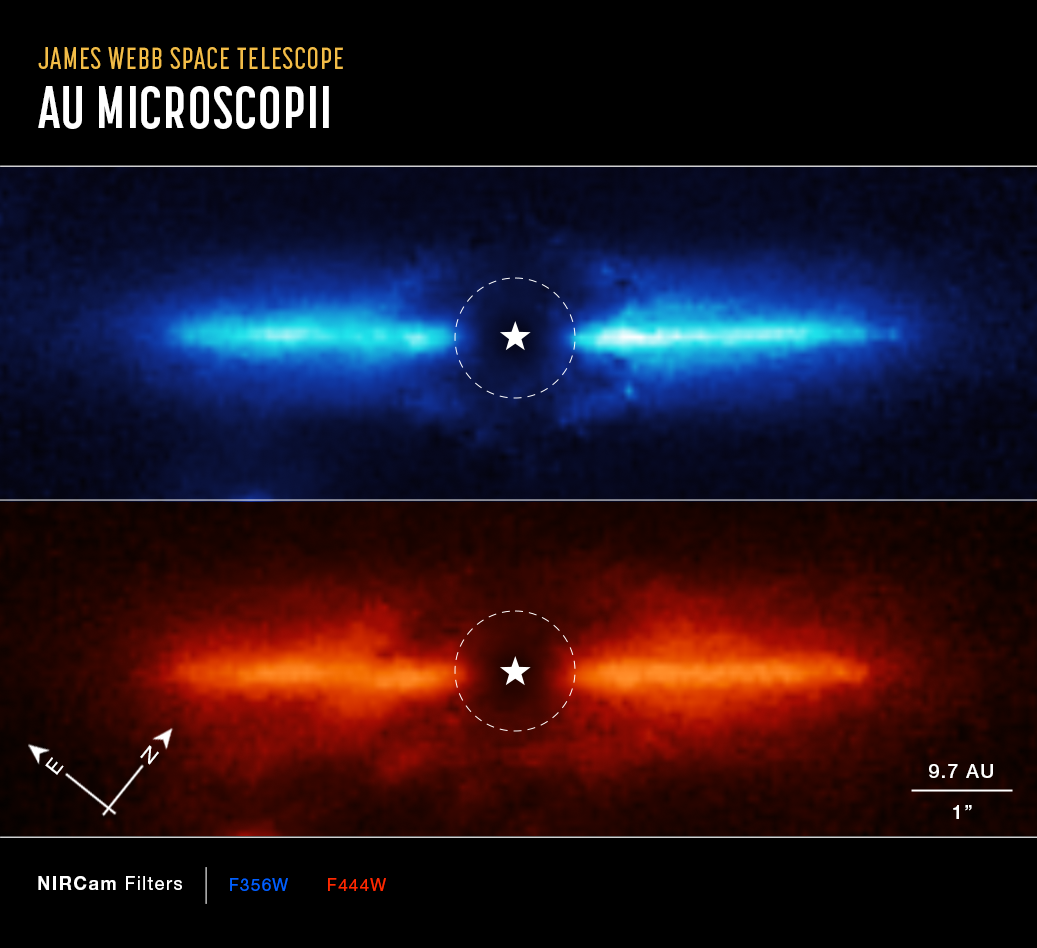

Dusty Debris Disk Around AU Mic (Annotated)

The NASA/ESA/CSA James Webb Space Telescope has imaged the inner workings of a dusty disk surrounding a nearby red dwarf star. These observations represent the first time the previously known disk has been imaged at these infrared wavelengths of light. They also provide clues to the composition of the disk.

These two images are of the dusty debris disk around AU Mic, a red dwarf star located 32 light-years away in the southern constellation Microscopium. Scientists used Webb’s Near-Infrared Camera (NIRCam) to study AU Mic. NIRCam’s coronagraph, which blocked the intense light of the central star, allowed the team to study the region very close to the star. The location of the star, which is masked out, is marked by a white, graphical representation at the center of each image. The region blocked by the coronagraph is shown by a dashed circle.

Webb provided images at 3.56 microns (top, blue) and 4.44 microns (bottom, red). The team found that the disk was brighter at the shorter or “bluer” wavelength, likely meaning that it contains a lot of fine dust that is more efficient at scattering shorter wavelengths of light.

The NIRCam images allowed the researchers to trace the disk, which spans a diameter of 60 astronomical units (9 billion kilometers), as close to the star as 5 astronomical units (740 million kilometers) – the equivalent of Jupiter’s orbit in our solar system. The images were more detailed and brighter than the team expected, and scientists were able to image the disk closer to the star than expected.

While detecting the disk is significant, the team’s ultimate goal is to search for giant planets in wide orbits, similar to Jupiter, Saturn, or the ice giants of our solar system. Such worlds are very difficult to detect around distant stars using either the transit or radial velocity methods.

These results are being presented in a press conference at the 241st meeting of the American Astronomical Society. The observations were obtained as part of Webb’s Guaranteed Time program 1184.

Credit: NASA, ESA, CSA, and K. Lawson (Goddard Space Flight Center), A. Pagan (STScI)